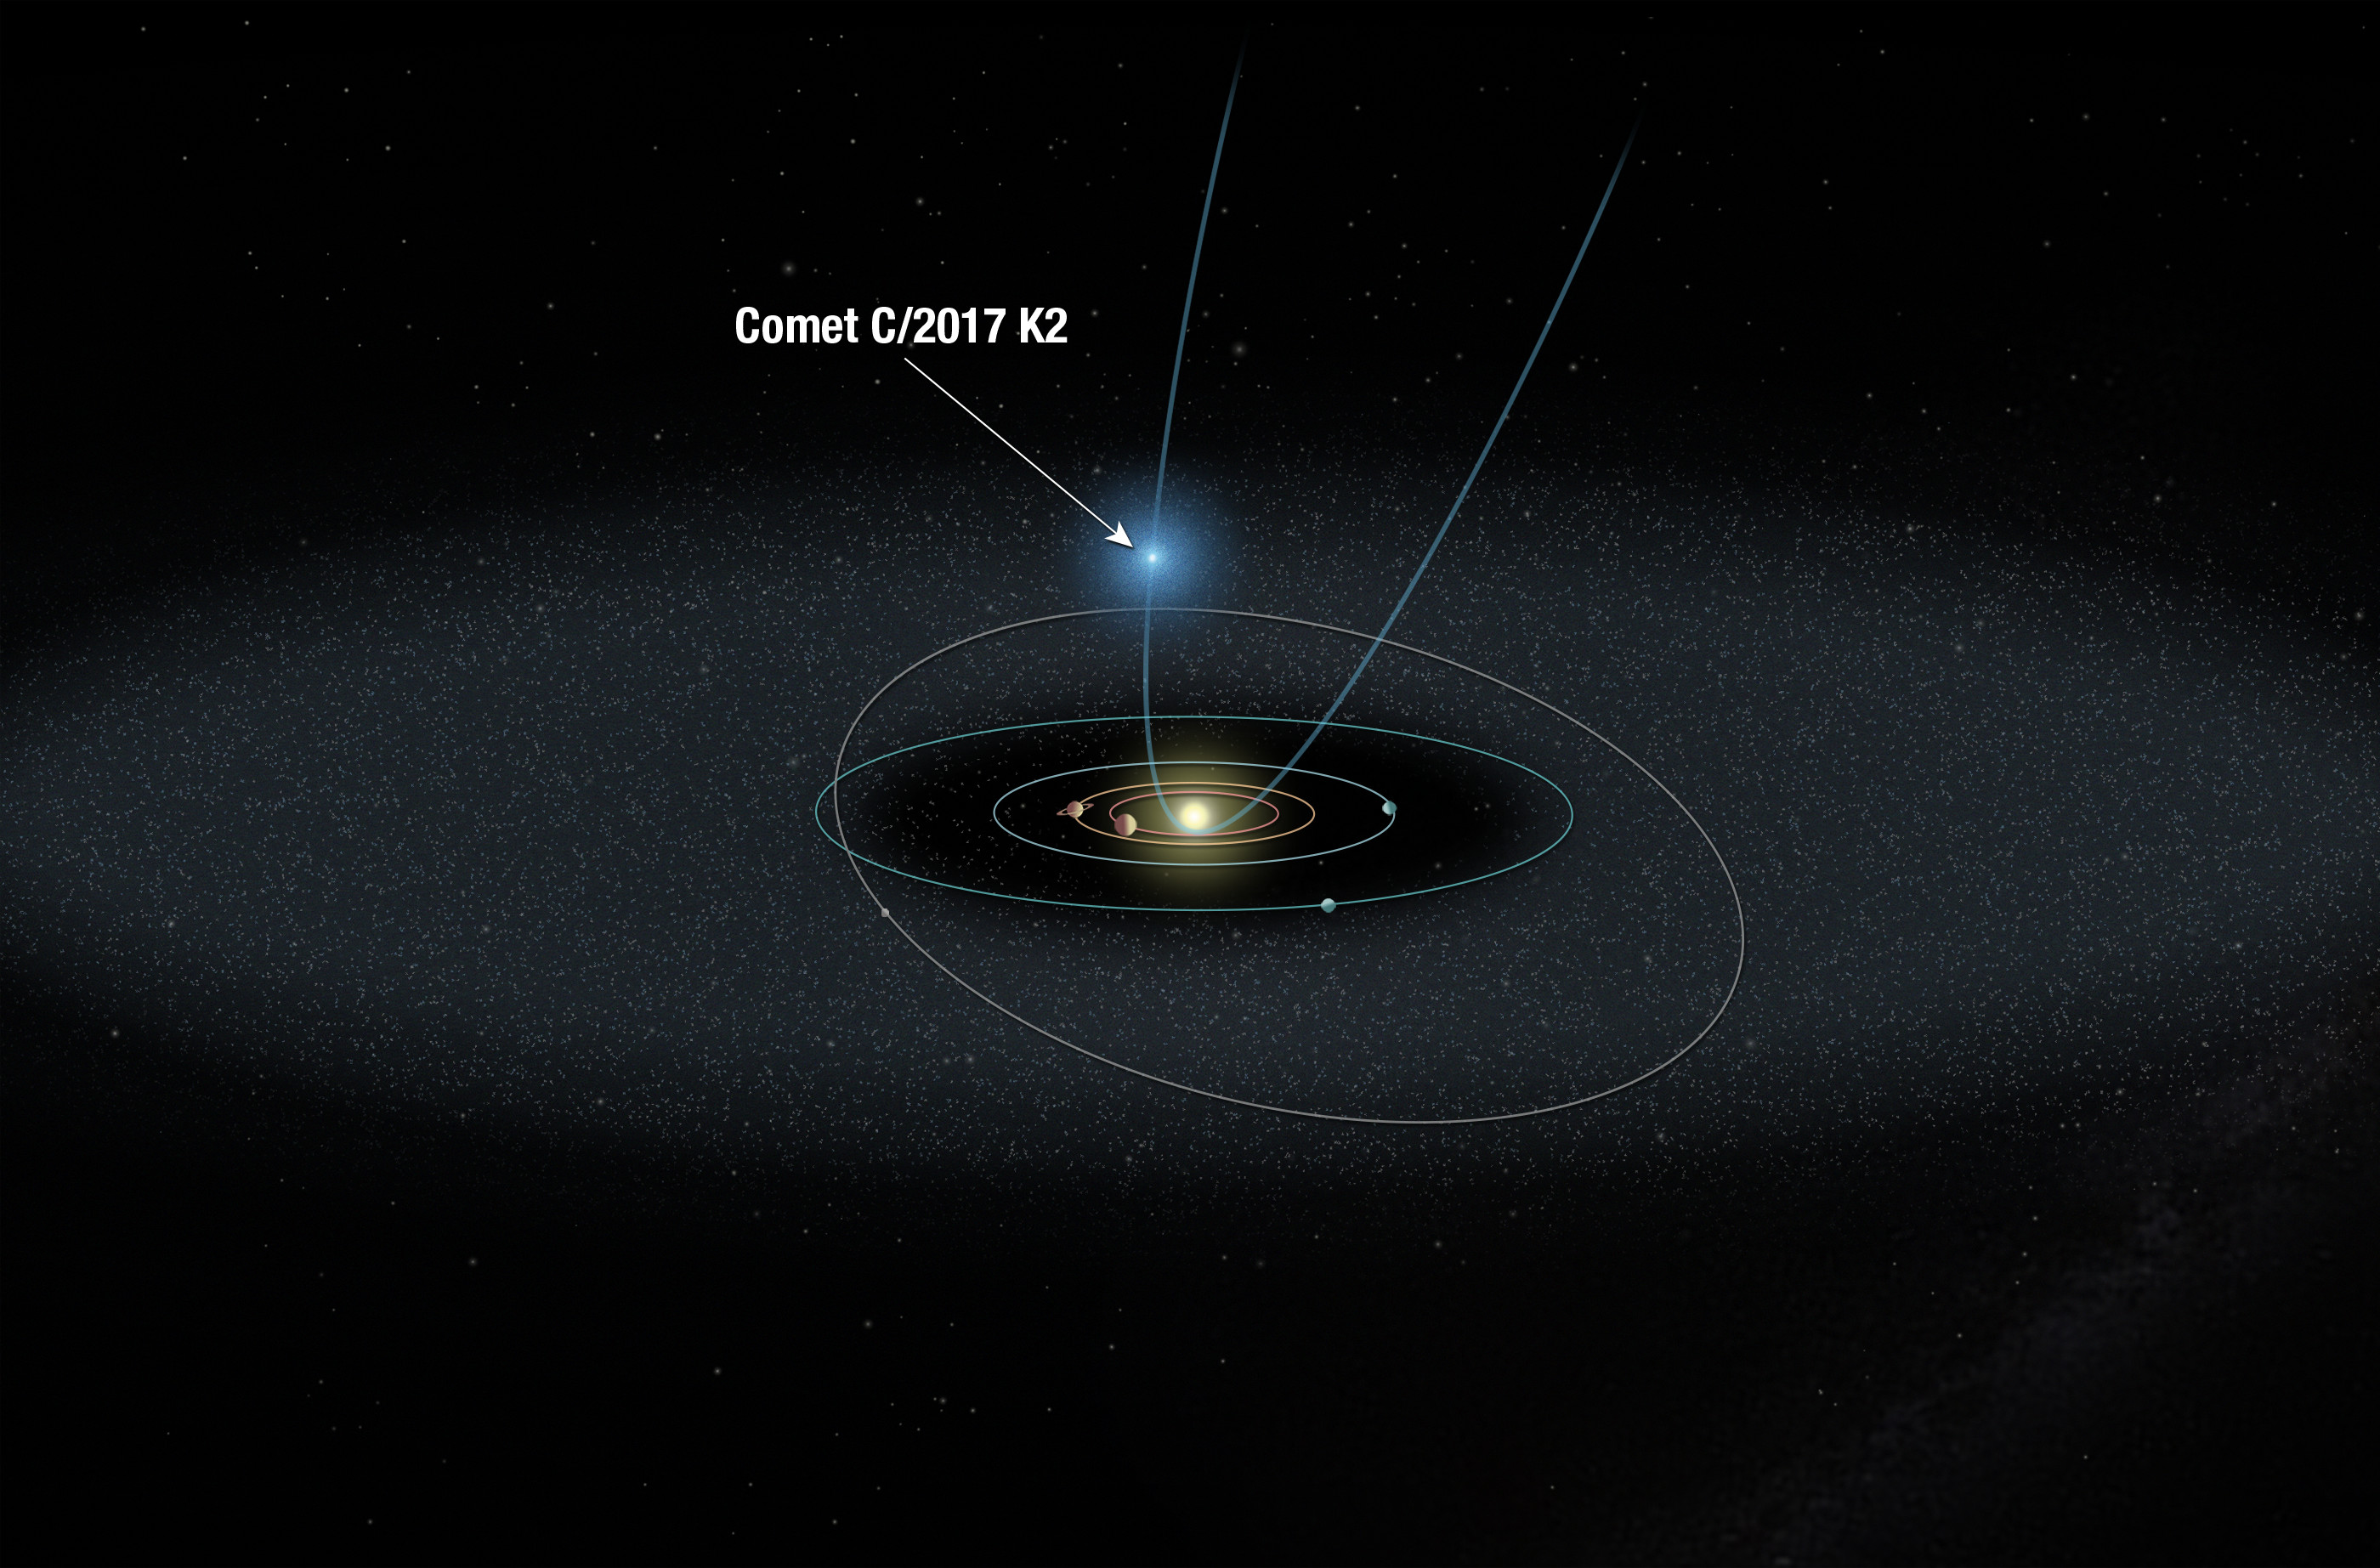

Schematic of comet C/2017 K2's approach to the Solar System

This illustration shows the orbit of comet C/2017 K2 PANSTARRS (K2) on its maiden voyage into the solar system. The Hubble Space Telescope observed K2 when it was over 2.4 billion kilometres from the Sun, halfway between the orbits of Saturn and Uranus. The observations revealed a fuzzy cloud of dust, called a coma, surrounding the icy visitor, evidence that the frozen comet is being warmed by the Sun and releasing material. K2 is the farthest active inbound comet ever observed. K2 has been traveling toward the Sun for millions of years from its home in the Oort Cloud, a spherical region at the edge of our solar system. The graphic shows the comet in its inbound journey, high above the plane of the major planets' orbits. The orbits of the giant planets, from Jupiter to Neptune, are also shown in the diagram. The farthest object from the Sun depicted here is the dwarf planet Pluto, which resides in the Kuiper Belt, a vast rim of primordial debris encircling our solar system.

Credit: NASA, ESA, and A. Feild (STScI)